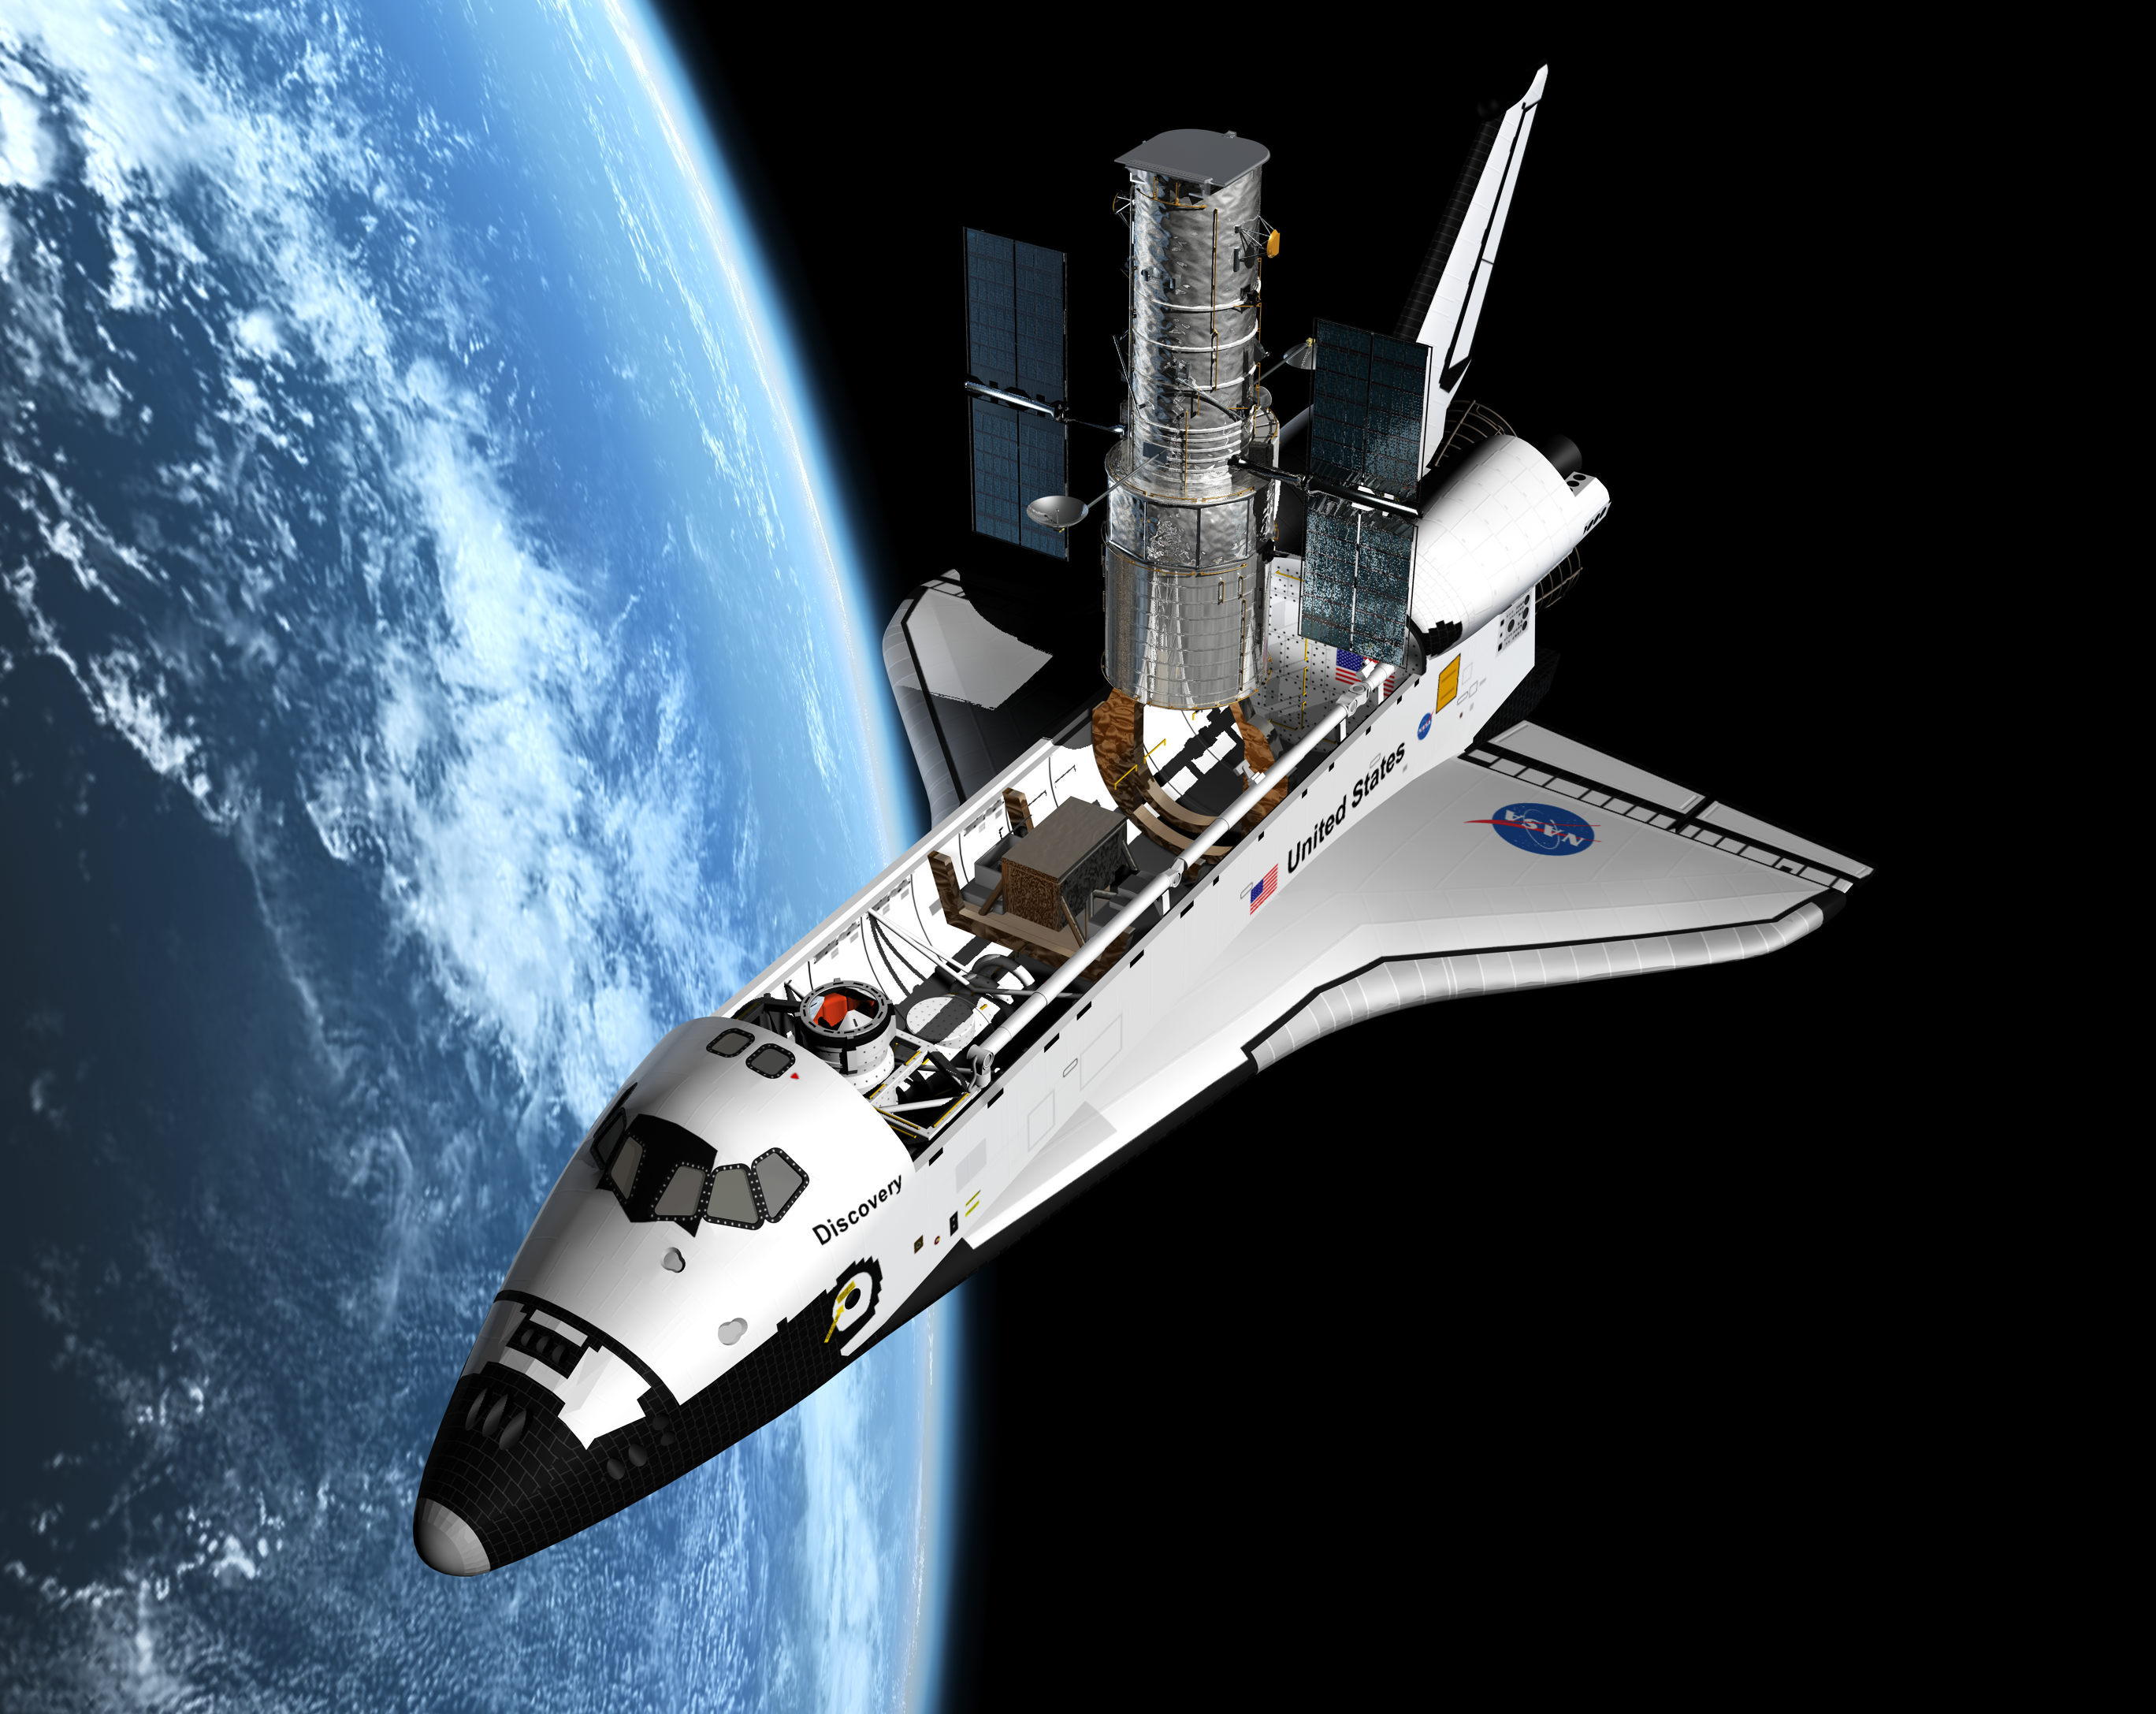

Artist's view of the Shuttle servicing mission to HST

This artist's impression shows the Space Shuttle during the currently planned Servicing Mission (SM4) to repair and upgrade the NASA/ESA Hubble Space Telescope in 2008.

This Servicing Mission will not only ensure that Hubble can function for perhaps as much as another ten years, it will also increase its capabilities significantly in key areas. As part of the upgrade, two new scientific instruments will be installed: the Cosmic Origins Spectrograph and the Wide Field Camera 3.

Credit: ESA/Hubble